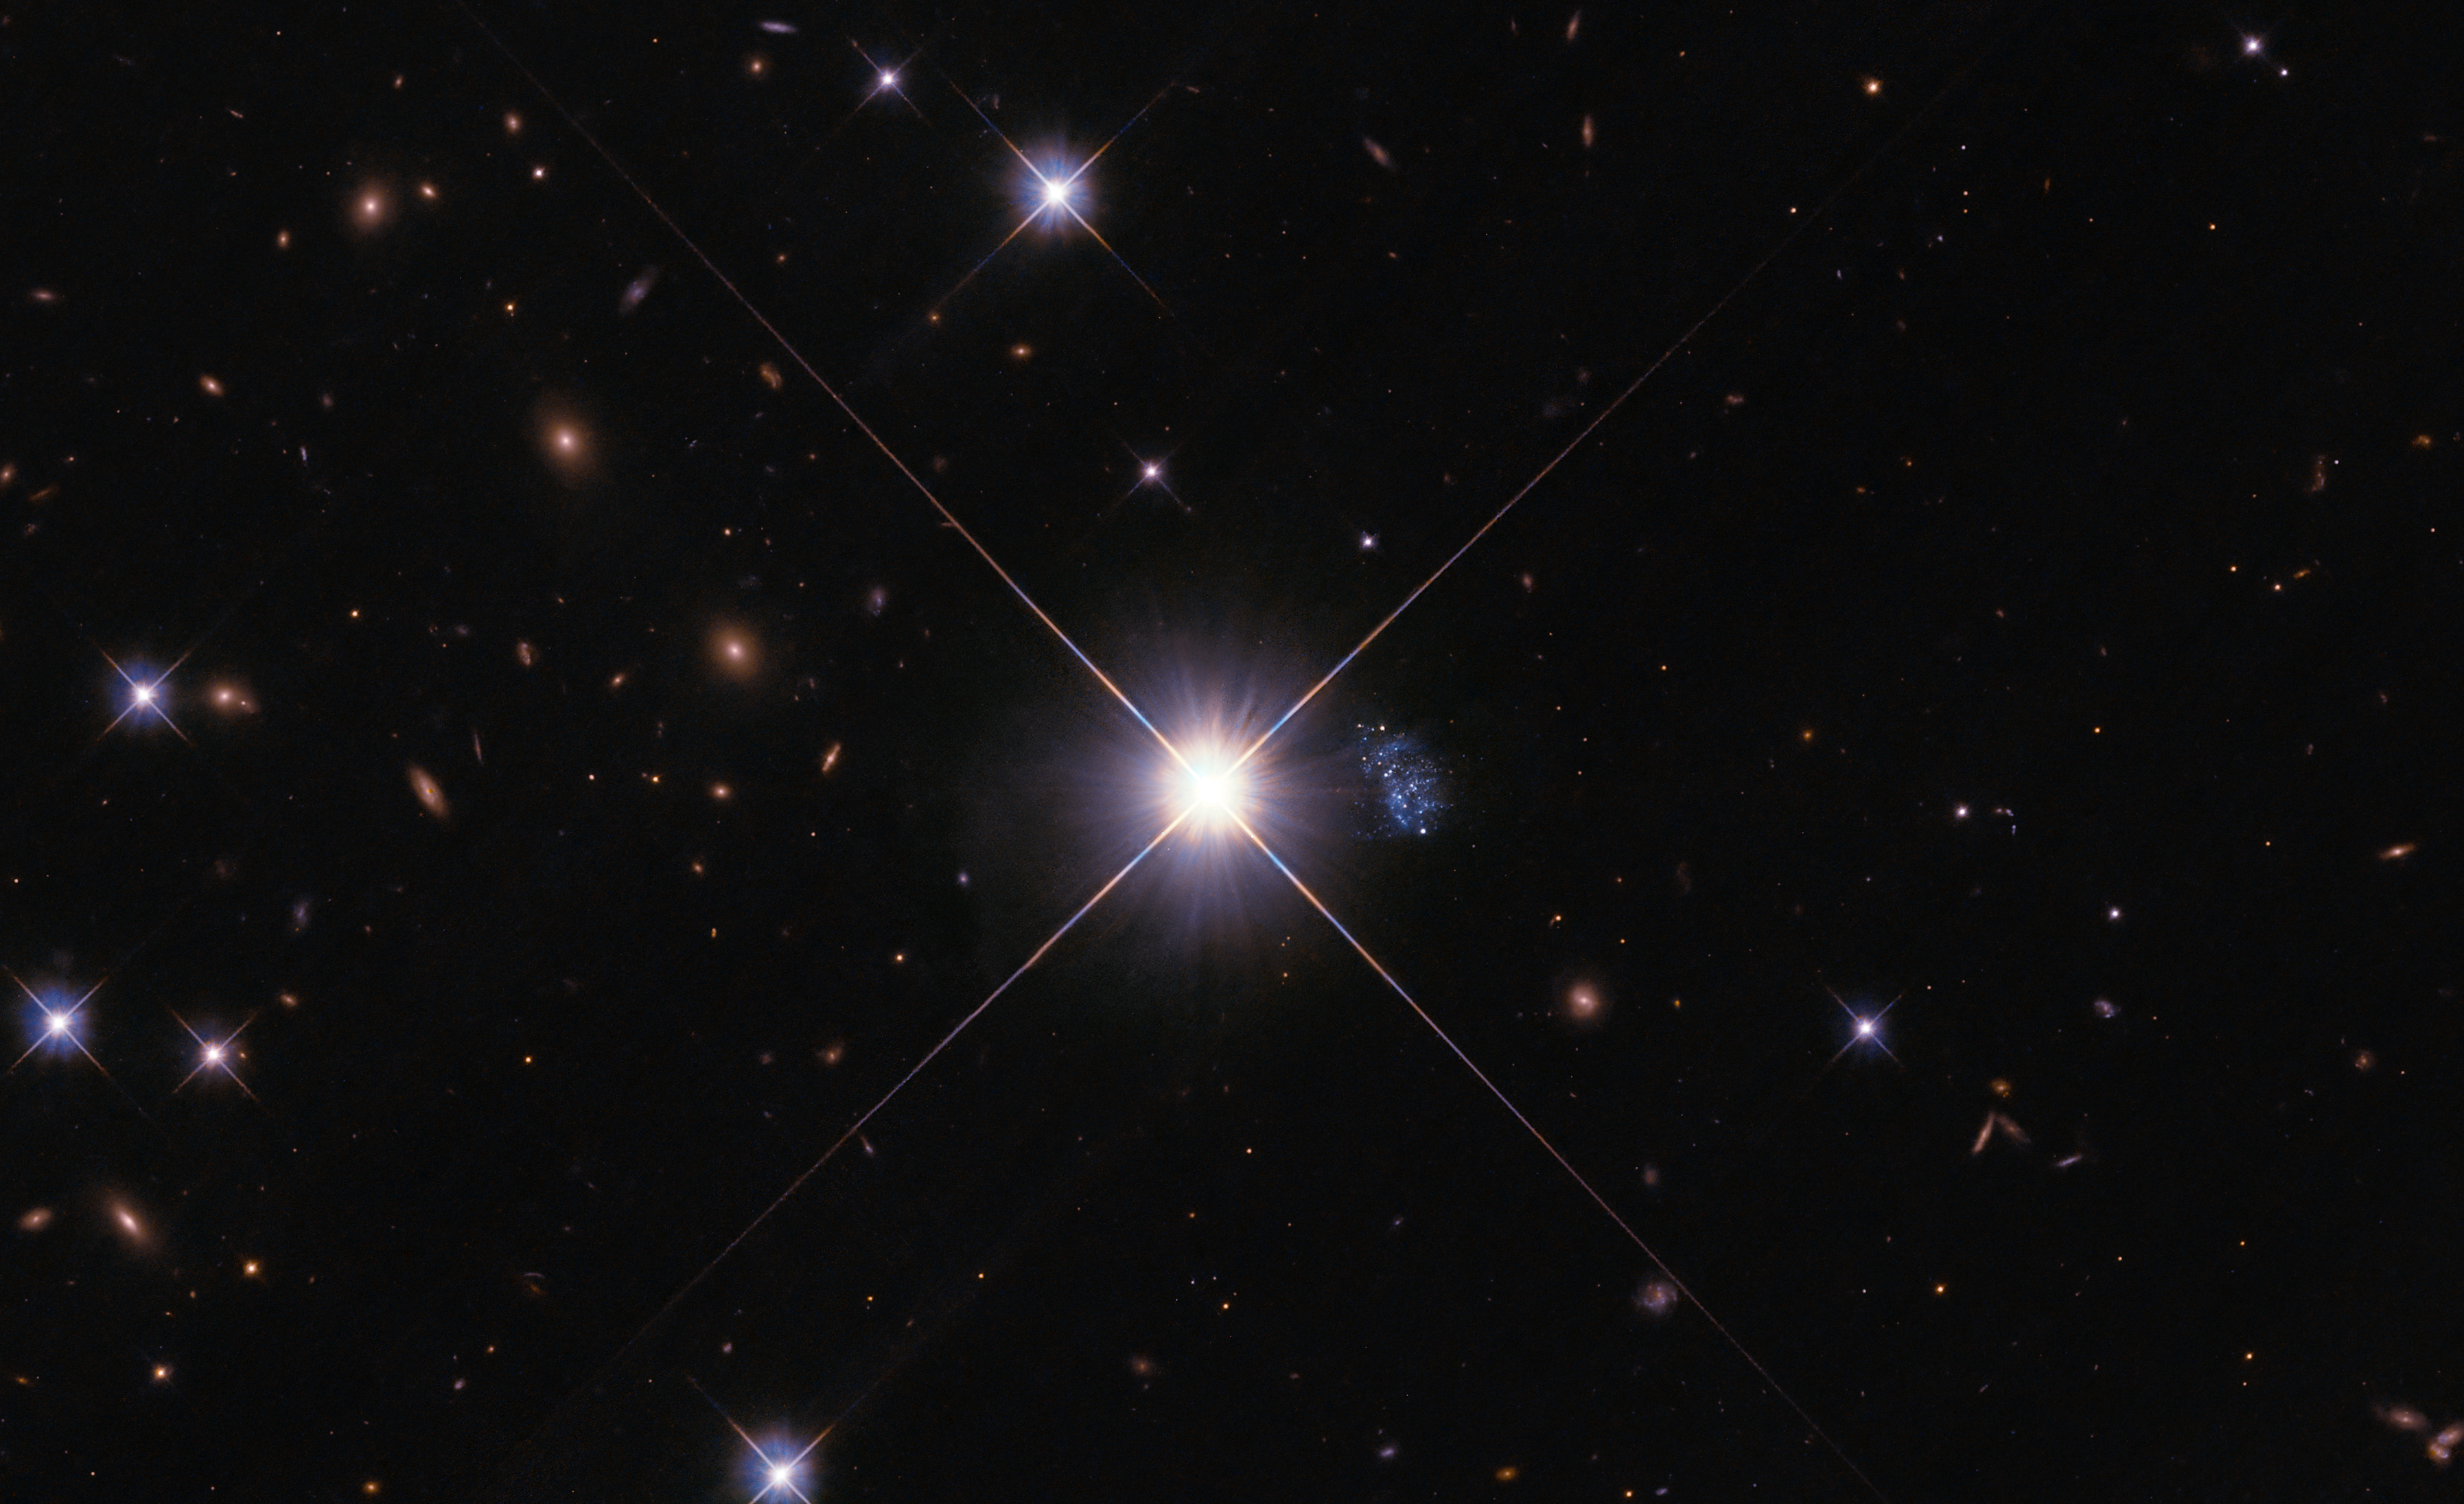

Tiny, Hidden Galaxy Provides A Peek Into The Past

Tiny galaxy HIPASS J1131–31 peeks out from behind the glare of star TYC 7215-199-1, a Milky Way star positioned between Hubble and the galaxy. One hundred years ago, this fast-moving foreground star would have appeared directly in the line of sight, and the "Peekaboo" galaxy would not have been detectable at all.

With the resolution and sensitivity of the NASA/ESA Hubble Space Telescope, astronomers resolved 60 stars in the galaxy and were struck by the fact that they all appear to be relatively young—a few billion years old or younger. This is very unusual in the nearby universe, which has had about 13 billion years of cosmic history to develop. Peekaboo's stars indicate that it is one of the youngest and least-chemically-enriched galaxies ever detected in the local universe. The small galaxy presents astronomers with a unique opportunity for future in-depth analysis of a chemical environment typically only found in the very distant, early universe, where detailed study of individual stars' chemical makeup is not possible. Peekaboo is, in effect, a direct portal into the past, allowing us to discover what the universe was like near the dawn of time.

Credit: NASA, ESA, G. Anand (STScI), A. Pagan (STScI)